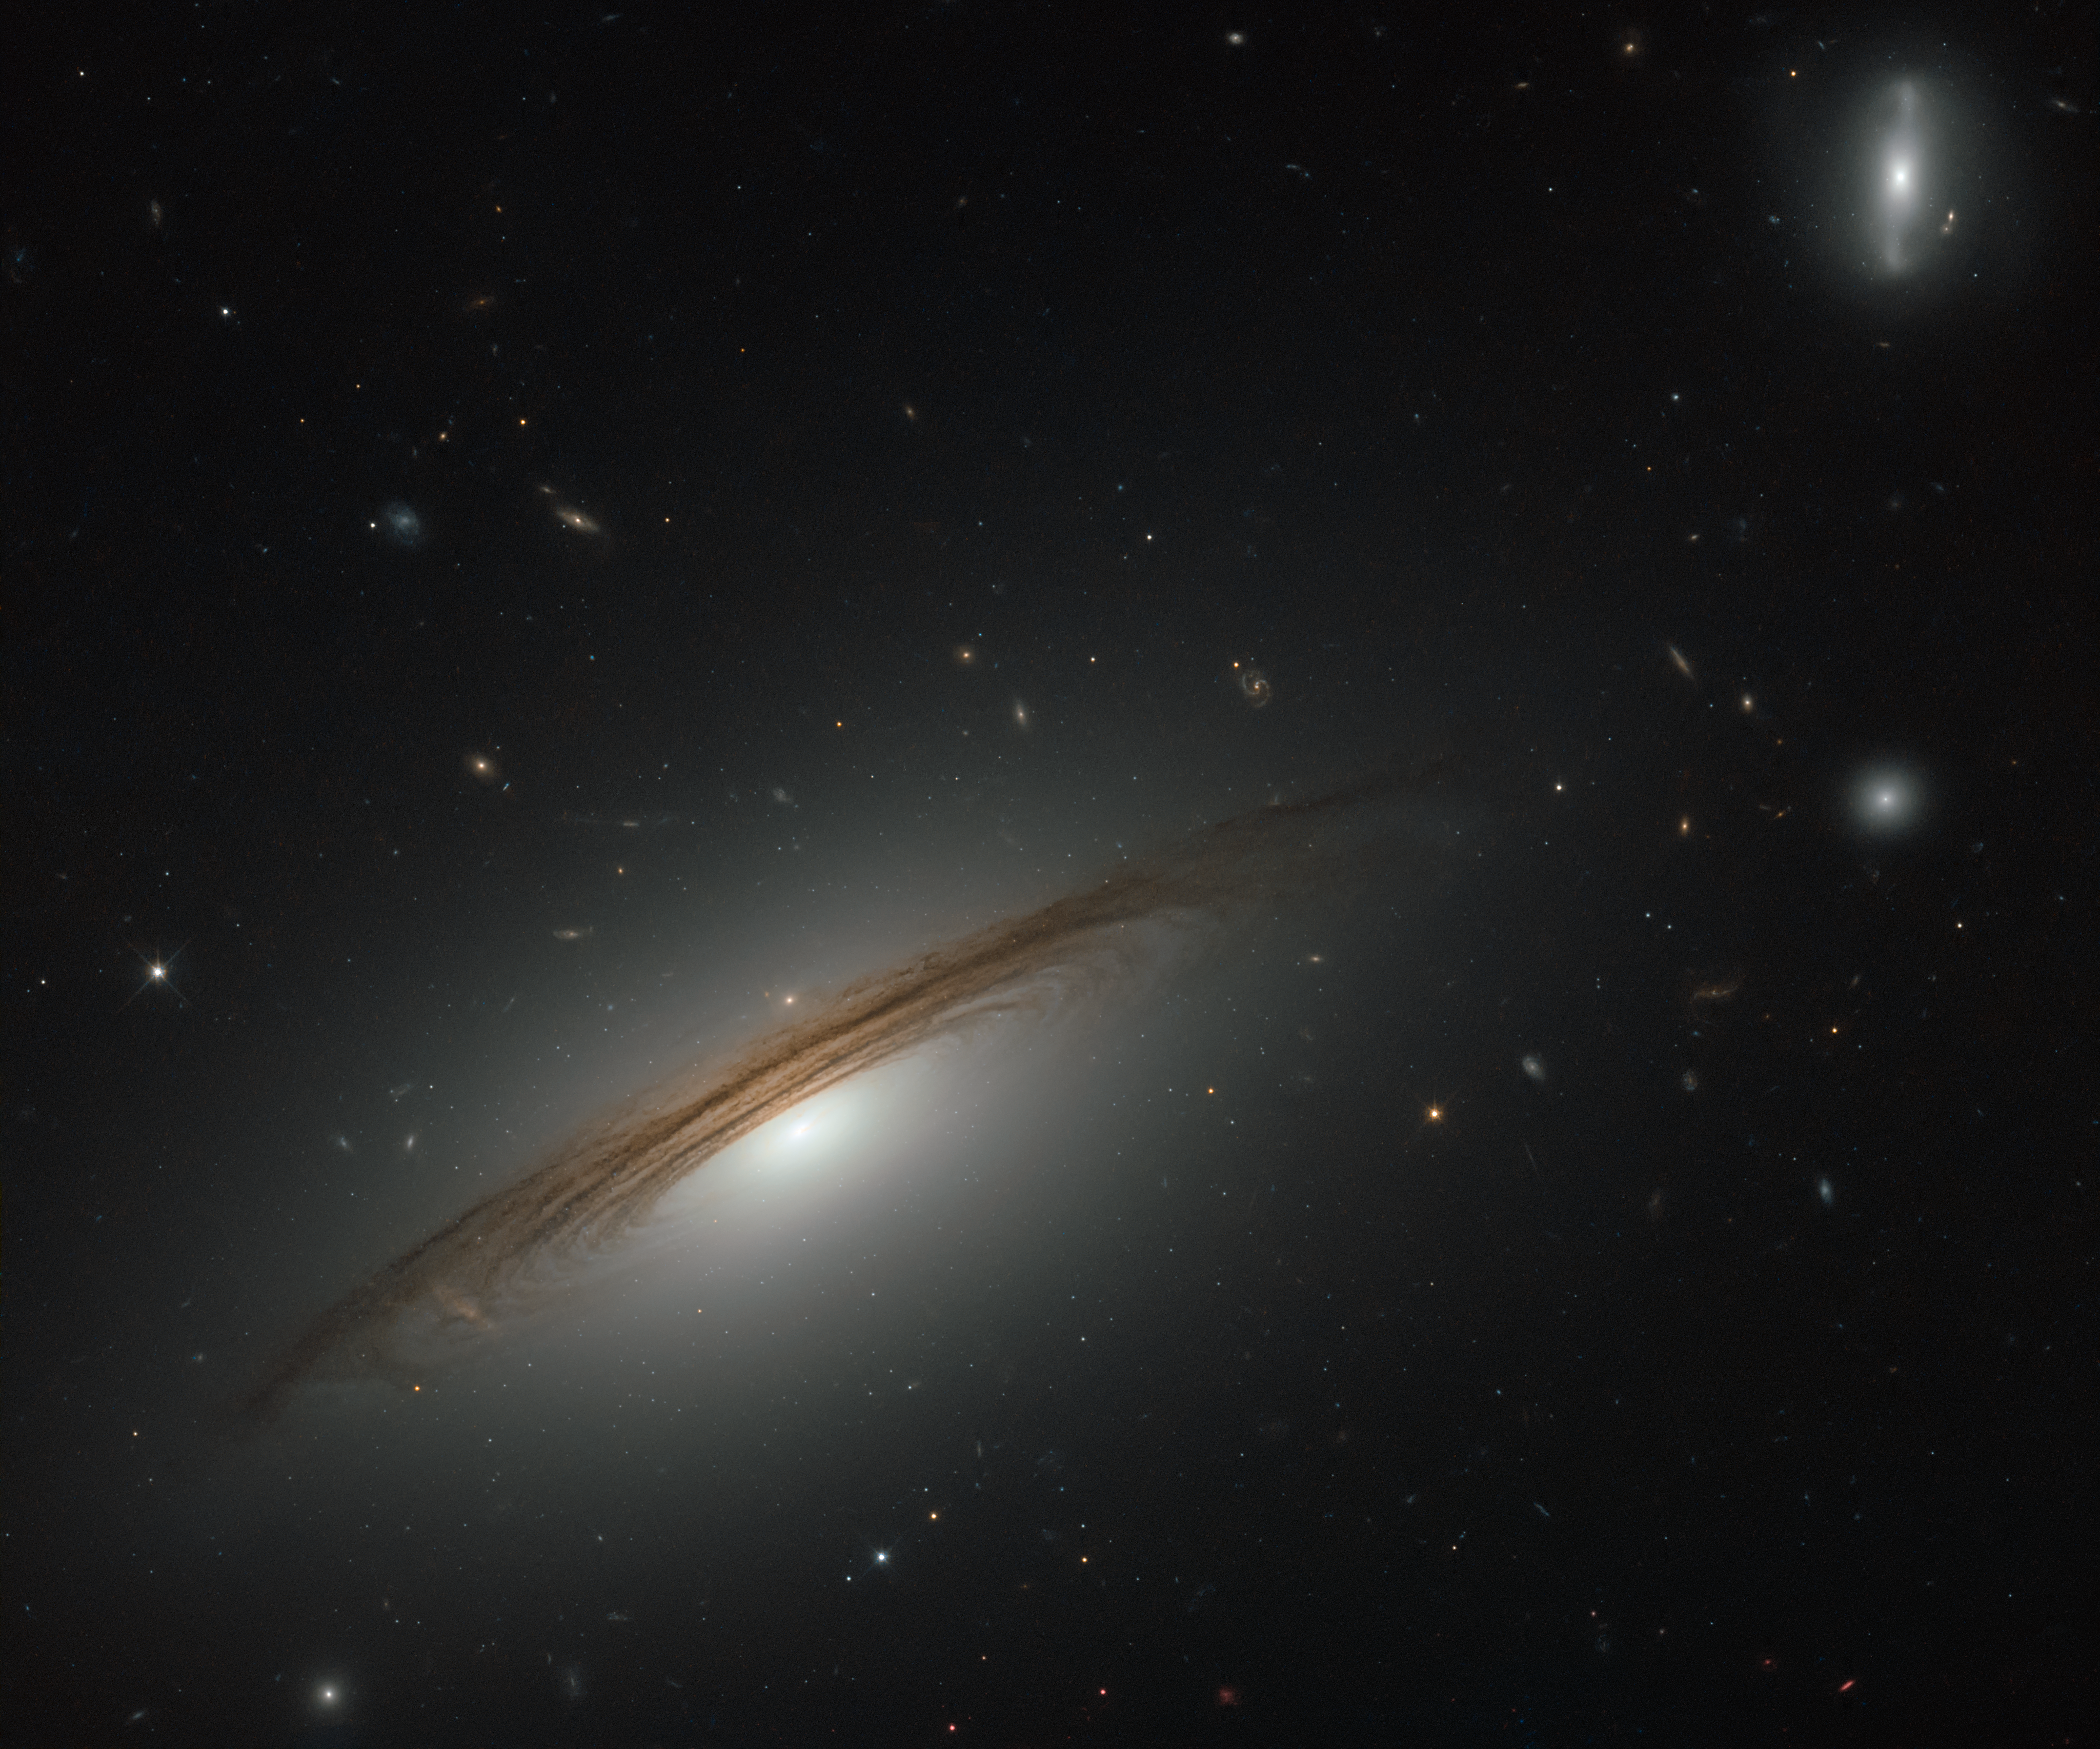

A remarkable galactic hybrid

This NASA/ESA Hubble Space Telescope image showcases the remarkable galaxy UGC 12591. Classified as an S0/Sa galaxy, UGC 12591 sits somewhere between a lenticular and a spiral. It lies just under 400 million light-years away from us in the westernmost region of the Pisces–Perseus Supercluster, a long chain of galaxy clusters that stretches out for 250 million light-years — one of the largest known structures in the cosmos.

The galaxy itself is also extraordinary: it is incredibly massive. The galaxy and its halo together contain several hundred billion times the mass of the Sun; four times the mass of the Milky Way. It also whirls round extremely quickly, rotating at speeds of up to 1.8 million kilometres per hour!

Observations with Hubble are helping astronomers to understand the mass of UGC 1259, and to determine whether the galaxy simply formed and grew slowly over time, or whether it might have grown unusually massive by colliding and merging with another large galaxy at some point in its past.

Credit: ESA/Hubble & NASA